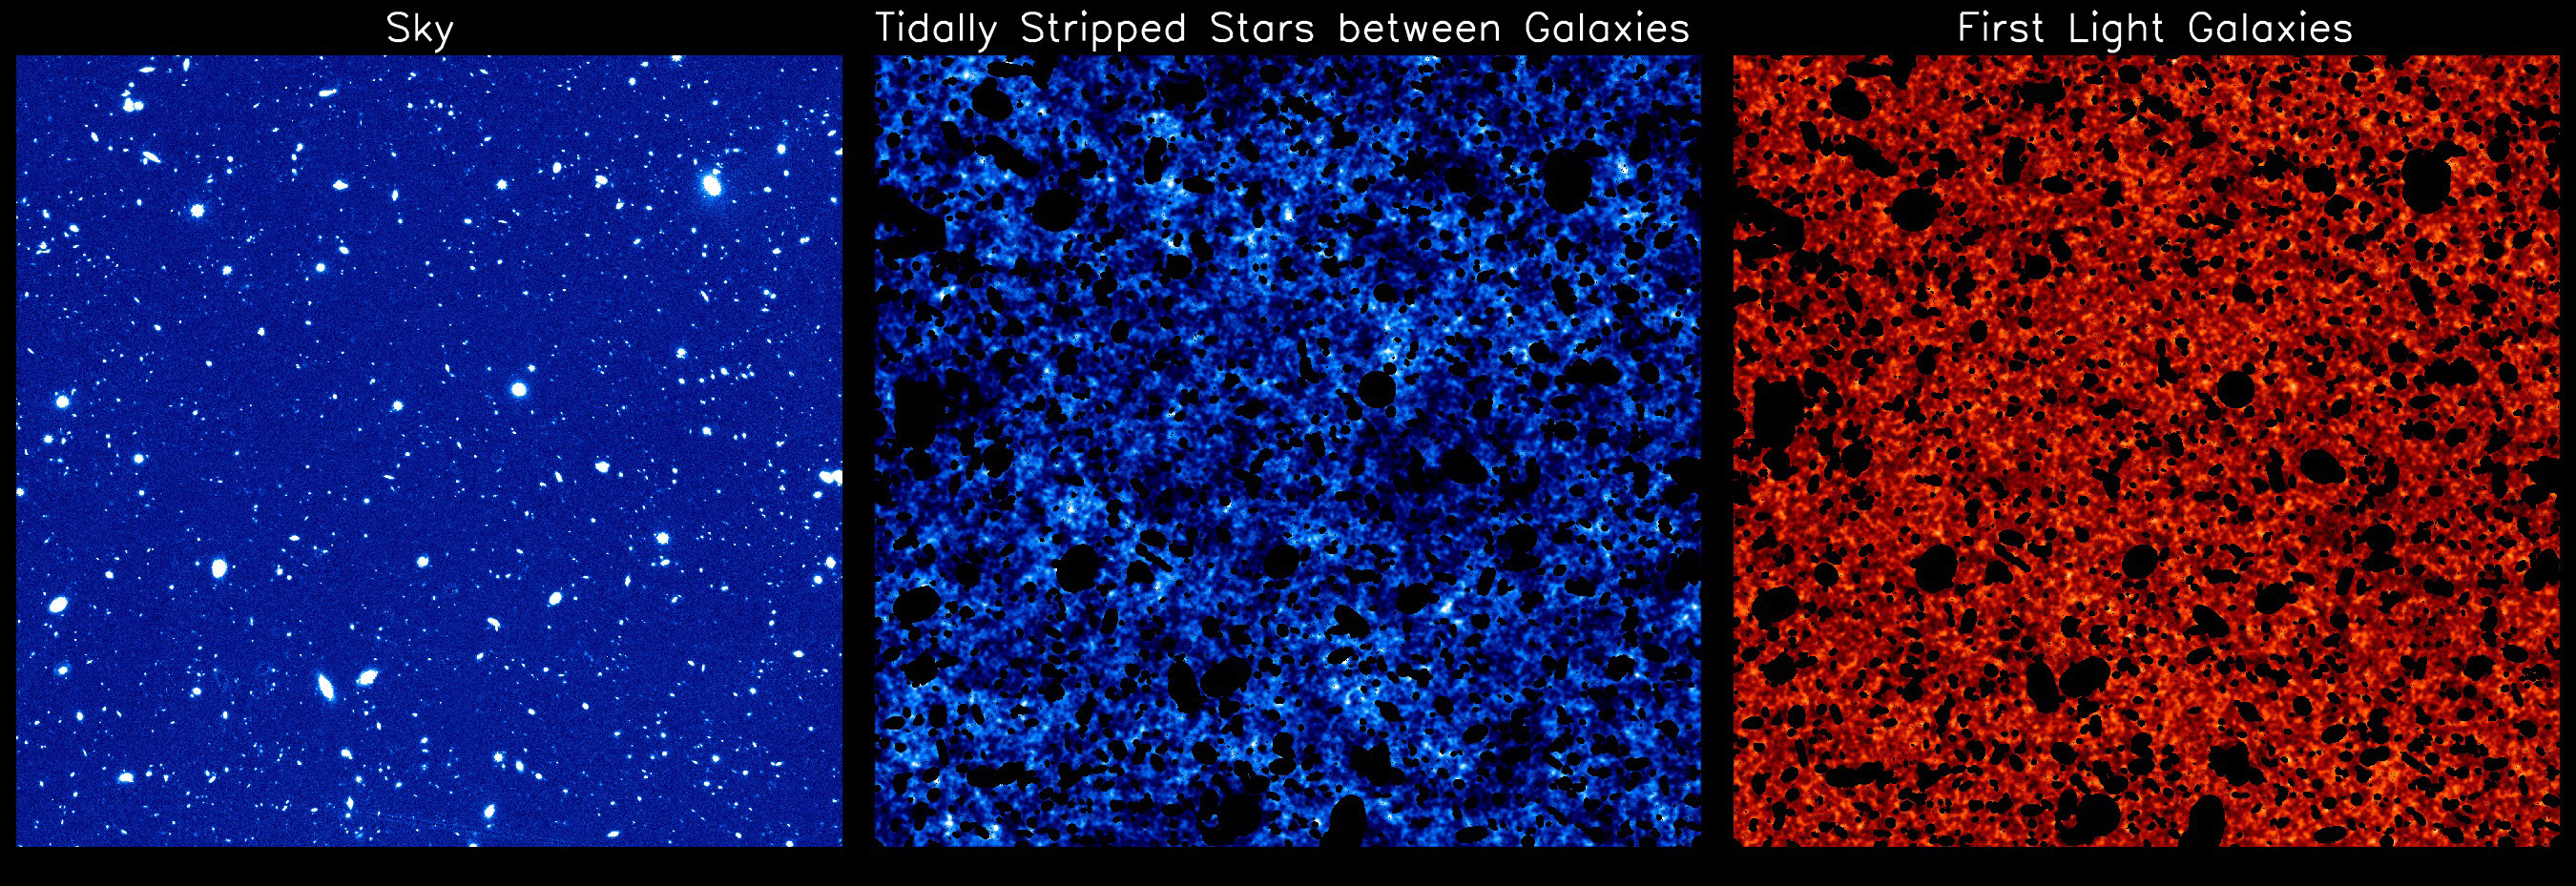

Signatures of the Earliest Galaxies

The three panels show different components of near-infrared background light detected by the Hubble Space Telescope in deep-sky surveys. The one on the left is a mosaic of images taken over a 10-year period. When all the stars and galaxies are masked, the background signals can be isolated, as seen in the second and third panels. The middle panel reveals "intra-halo light" from rogue stars torn from their host galaxies, and the panel on the right captures the signature of the first galaxies formed in the universe.

Credit: NASA, ESA, and K. Mitchell-Wynne (University of California, Irvine)